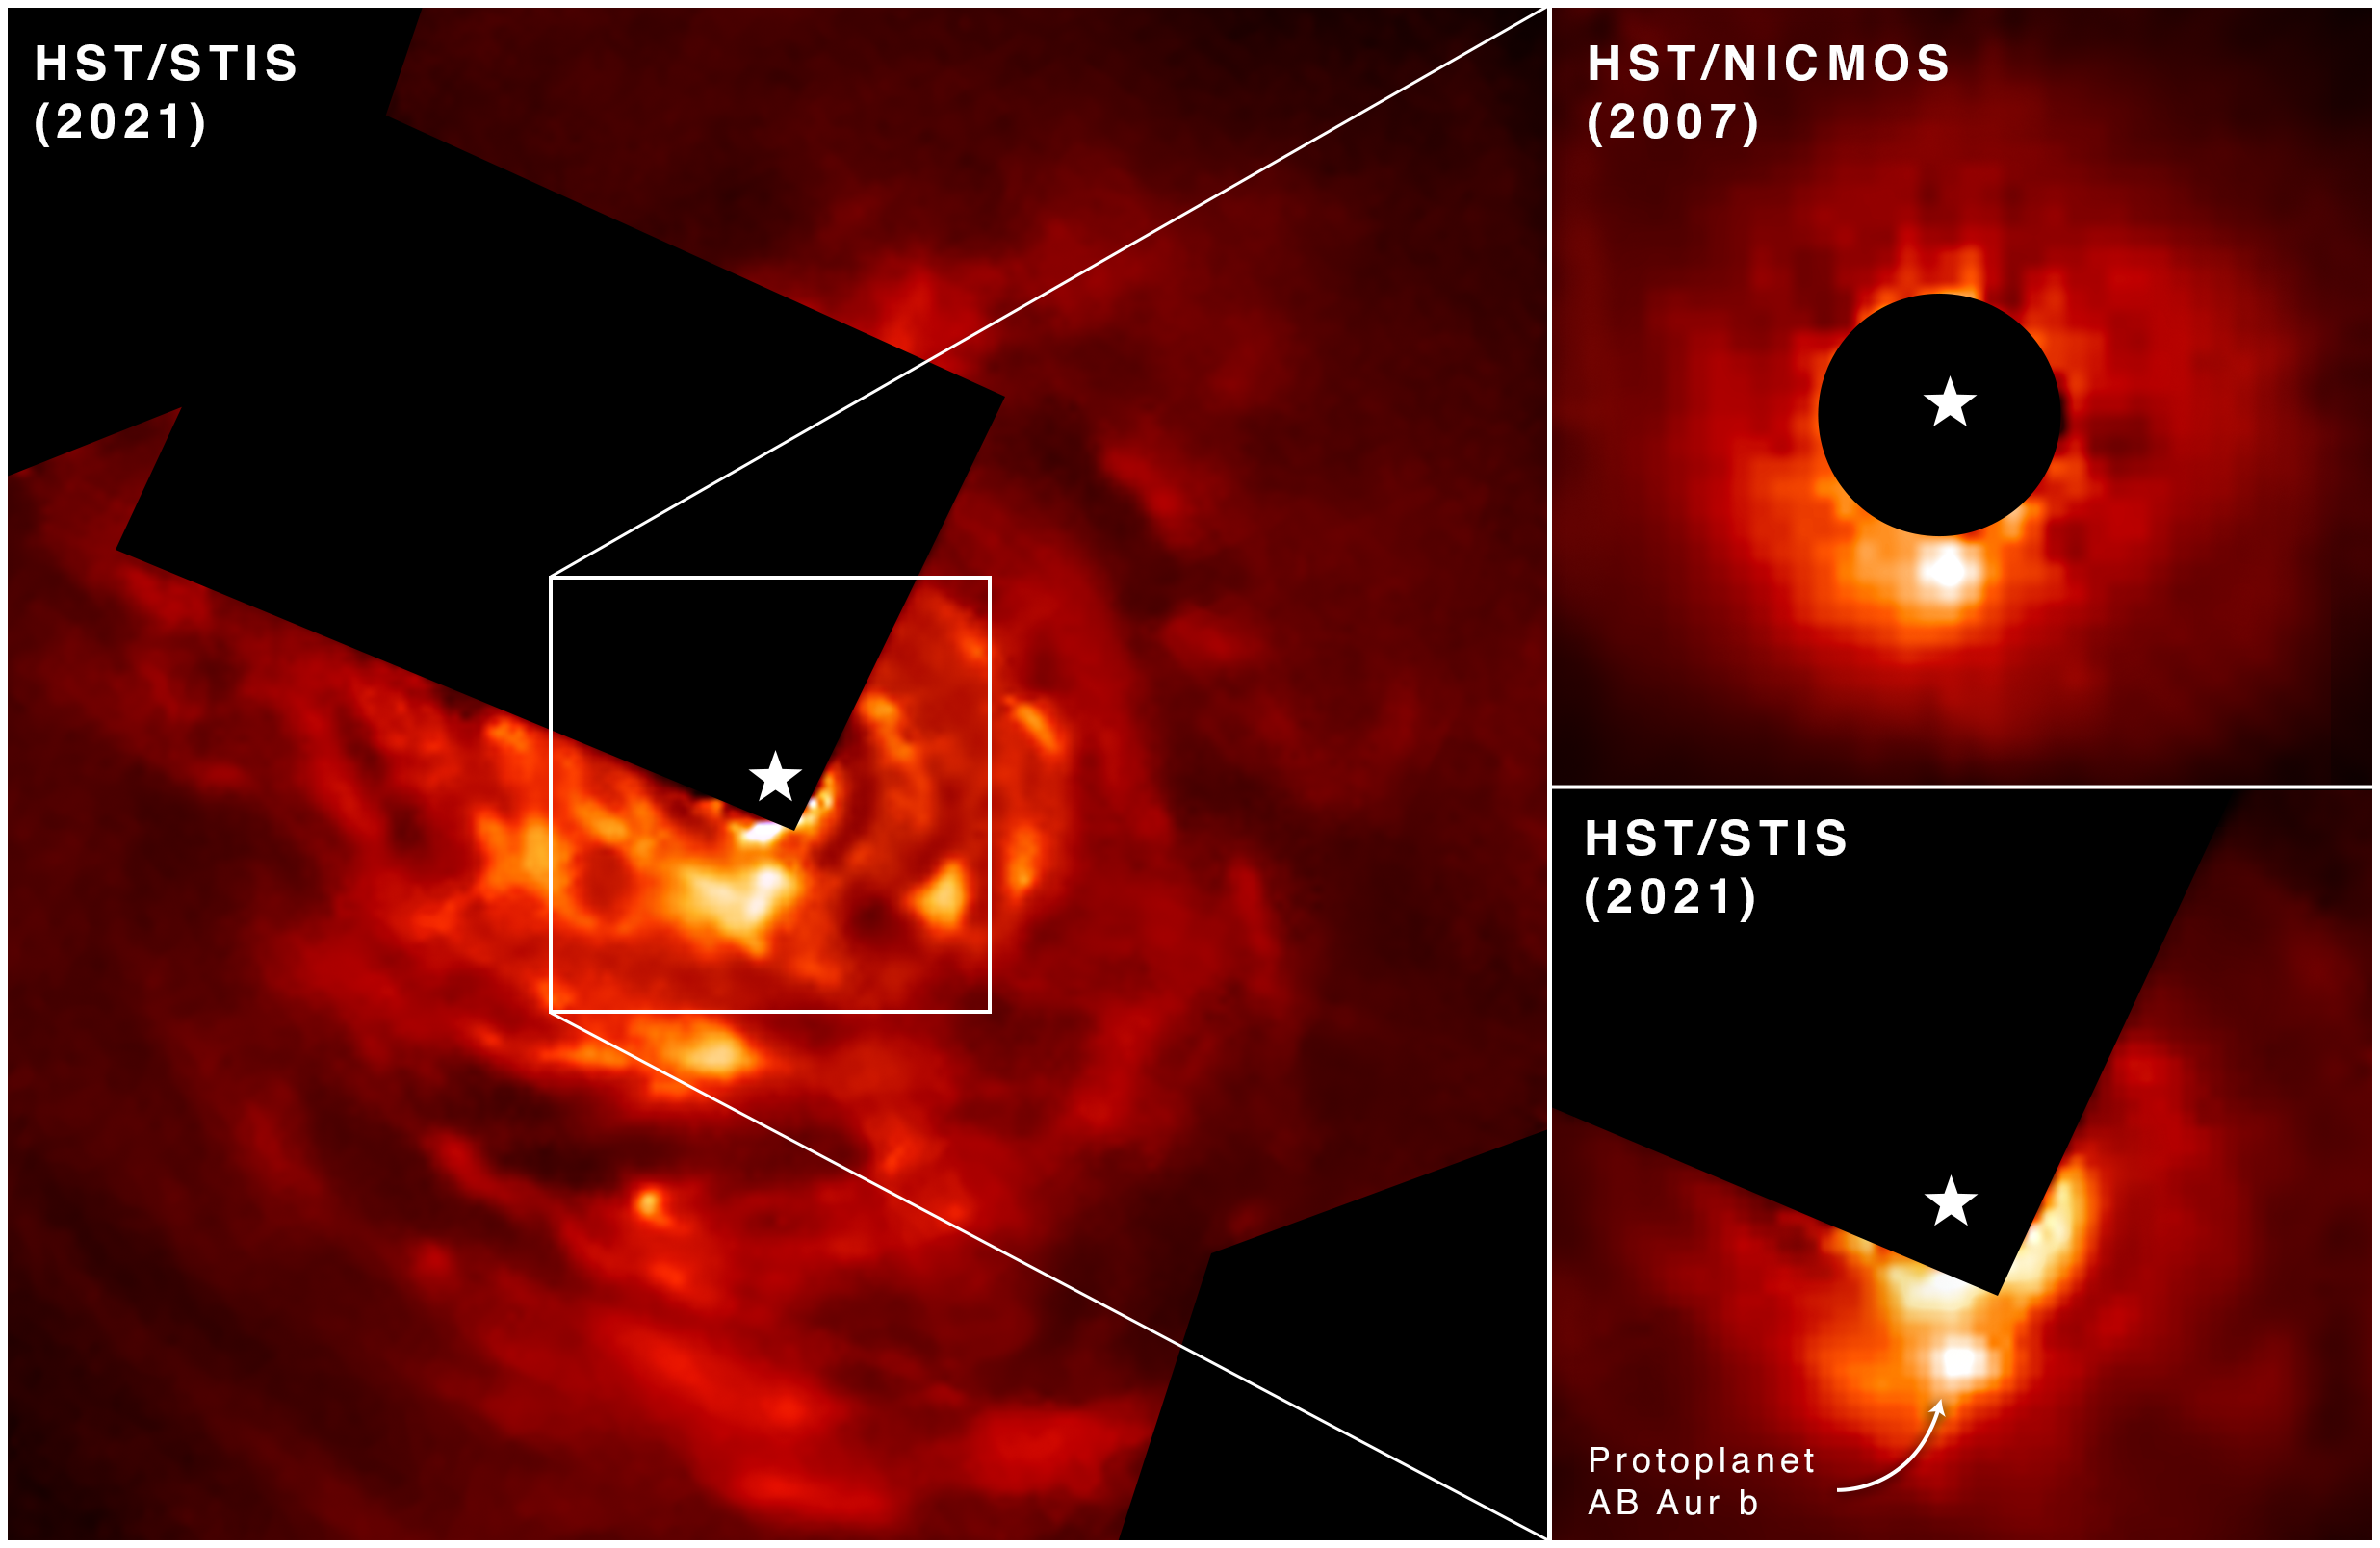

Hubble Finds a Planet Forming in an Unconventional Way

The NASA/ESA Hubble Space Telescope has directly photographed evidence of a Jupiter-like protoplanet forming through what researchers describe as an "intense and violent process." This discovery supports a long-debated theory for how planets like Jupiter form, called "disk instability."

The new world under construction is embedded in a protoplanetary disk of dust and gas with distinct spiral structure swirling around surrounding a young star that’s estimated to be around 2 million years old. That's about the age of our solar system when planet formation was underway. (The solar system's age is currently 4.6 billion years.)

Researchers were able to directly image newly forming exoplanet AB Aurigae b over a 13-year span using the Hubble Space Telescope Imaging Spectrograph (STIS) and its Near Infrared Camera and Multi-Object Spectrograph (NICMOS).

In the top right, Hubble’s NICMOS image captured in 2007 shows AB Aurigae b in a due south position compared to its host star, which is covered by the instrument’s coronagraph. The image captured in 2021 by STIS shows the protoplanet has moved in a counterclockwise motion over time.

Credit: NASA, ESA, T. Currie (Subaru Telescope, Eureka Scientific Inc.), A. Pagan (STScI)